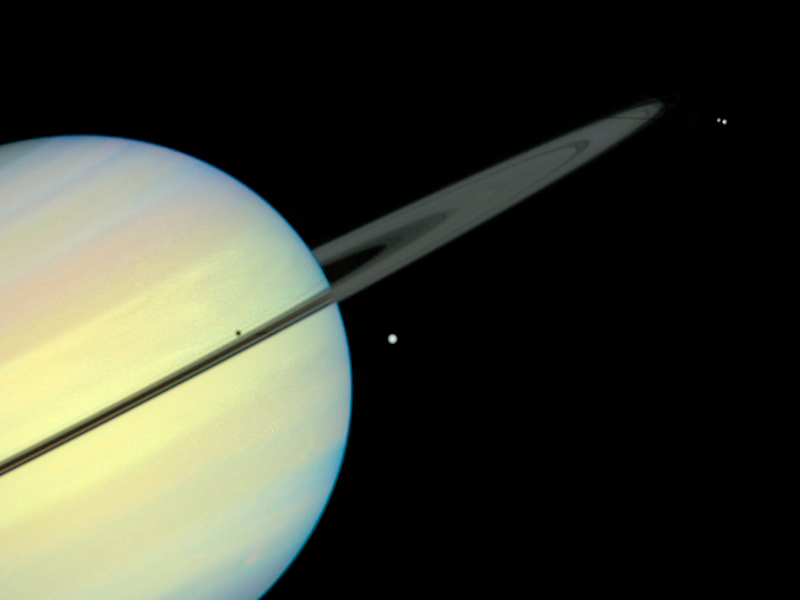

Saturn's Moons - Frame 6

This movie still captures the moons Mimas, Enceladus, and Dione as they begin their race across Saturn's disk. The still is from a movie created from images taken by NASA/ESA Hubble Space Telescope. It reveals the planet's rings tilted nearly edge-on toward the Sun, an event that occurs once every 15 years. Because of this special alignment, the moons cast shadows on the planet and its rings.

Credit: NASA/ESA and E. Karkoschka (University of Arizona)